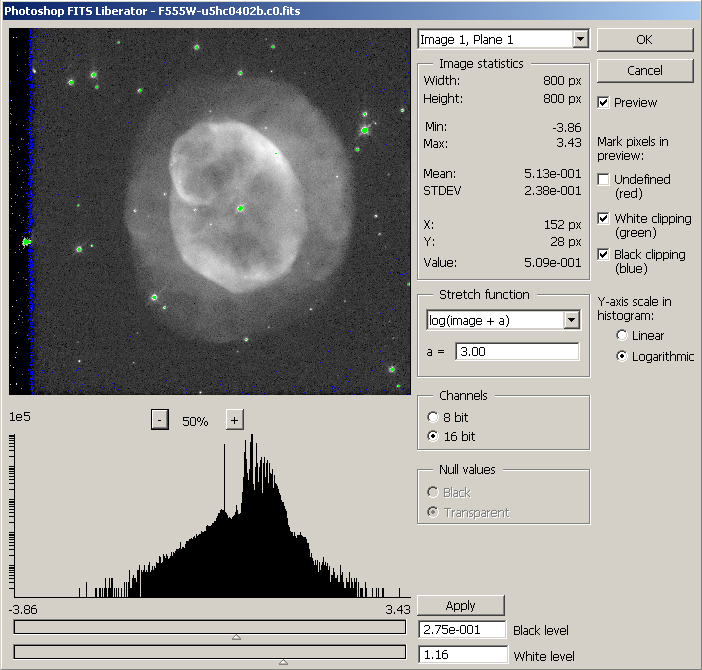

Screenshot of the FITS Liberator

This screenshot shows the ESA/ESO/NASA Photoshop FITS Liberator in action. The plug-in has a number of interactive features that makes it easy for the imaging professional to produce attractive colour images of stars and galaxies. Preset values of the different sliders and menus make the plug-in easily accessible for the layman.

The largest part of the plug-in shows a preview pane. Below the preview a histogram shows the distribution of greyscale intensities.

Read more about the function of the plug-in here: http://www.spacetelescope.org/projects/fits_liberator/userguide.html

Credit: ESA, ESO and NASA